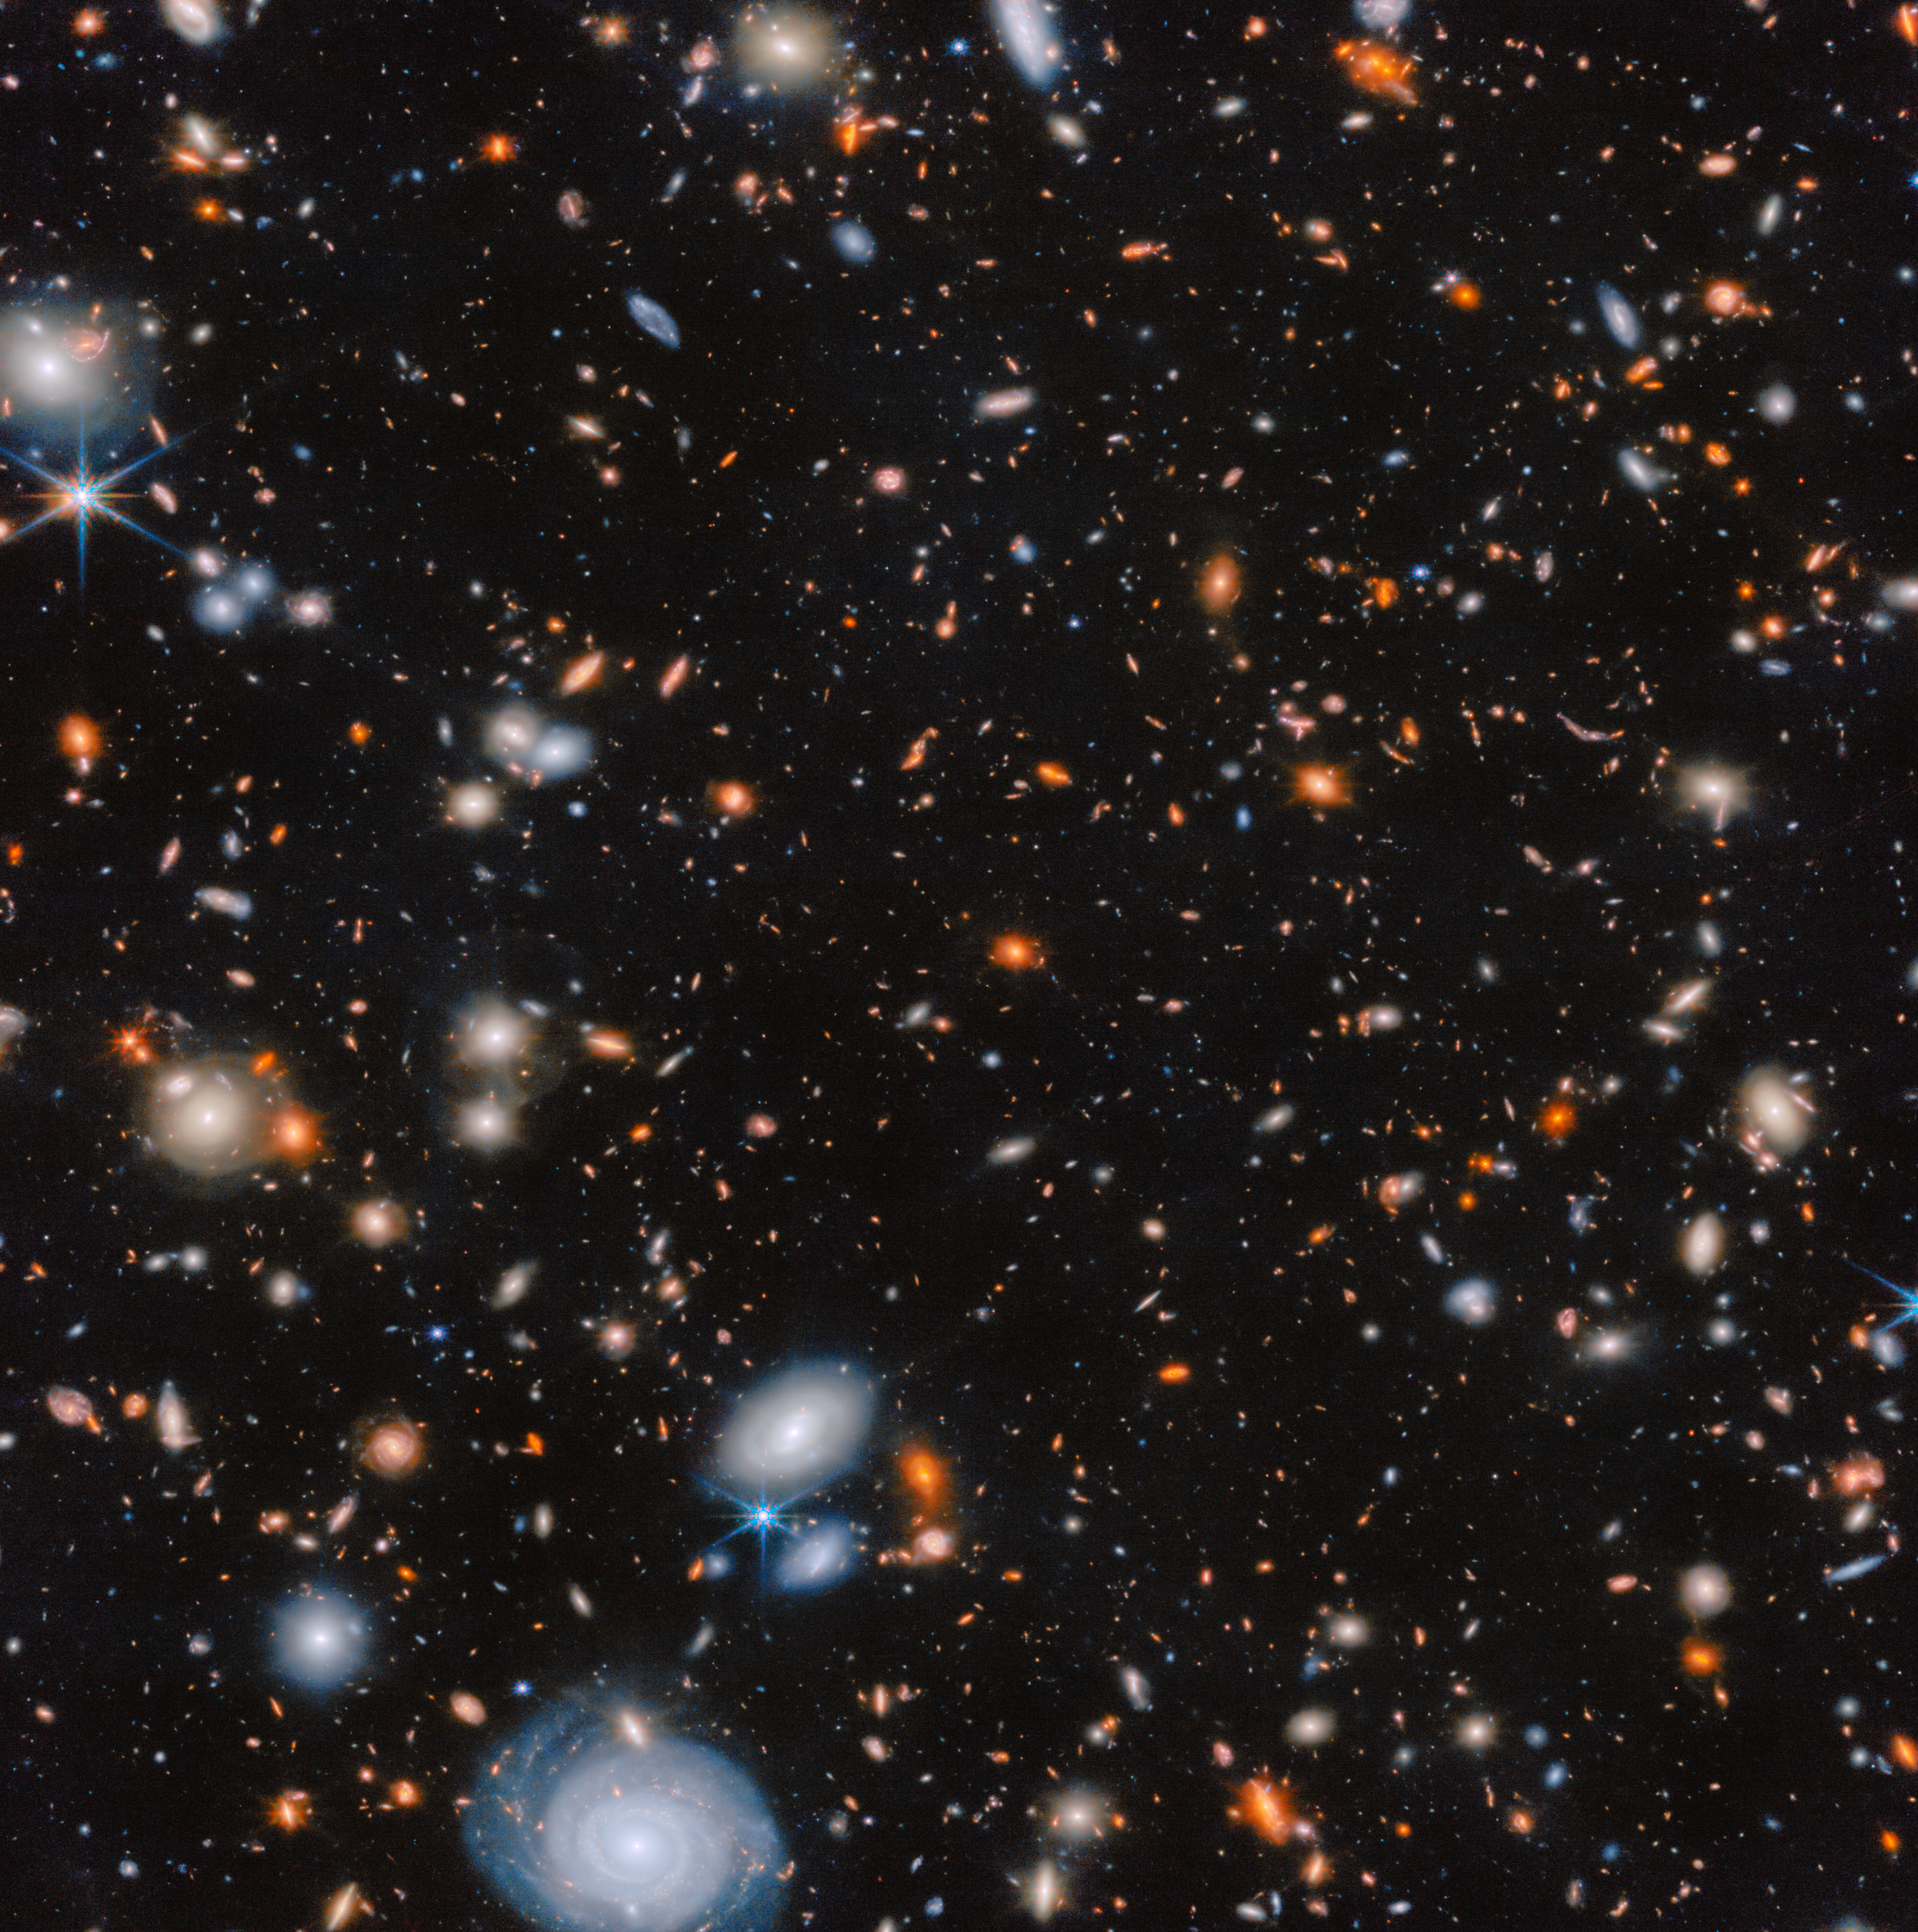

MACS J1149.5+2223

This image shows a portion of the galaxy cluster MACS J1149.5+2223, as seen by Webb’s Near-Infrared Camera (NIRCam). With Webb’s excellent sensitivity to infrared light and the hours of exposure time combined in this image, distant galaxies (red colours) are brought out of the darkness. Other galaxies glow strongly from the abundance of light they radiate.

These observations come from the CANUCS survey (#1208, PI: C. J. Willott). The survey employed Webb’s advanced instruments, including NIRCam, NIRISS and NIRSpec, to capture detailed images and spectra of massive galaxy clusters in infrared light. Astronomers could then study low-mass galaxies in these early clusters at early stages of evolution. Because of how Webb’s instruments work, for each cluster the survey targeted both the cluster’s centre, where the brightest and largest galaxies are gathered, and a “parallel field” of a neighbouring area within the cluster. This image features one of these parallel fields.

Researchers studying the data from the CANUCS survey uncovered a distant galaxy, named CANUCS-LRD-z8.6, in this parallel field. The galaxy is extremely distant (seen only 570 million years after the Big Bang) and the team’s research revealed that it hosts a supermassive black hole that is unusually large for such an early stage in the Universe. This result challenges existing theories about the formation of galaxies and black holes in the early Universe.

Credit: ESA/Webb, NASA & CSA, G. Rihtaršič (University of Ljubljana, FMF), R. Tripodi (University of Ljubljana, FMF)